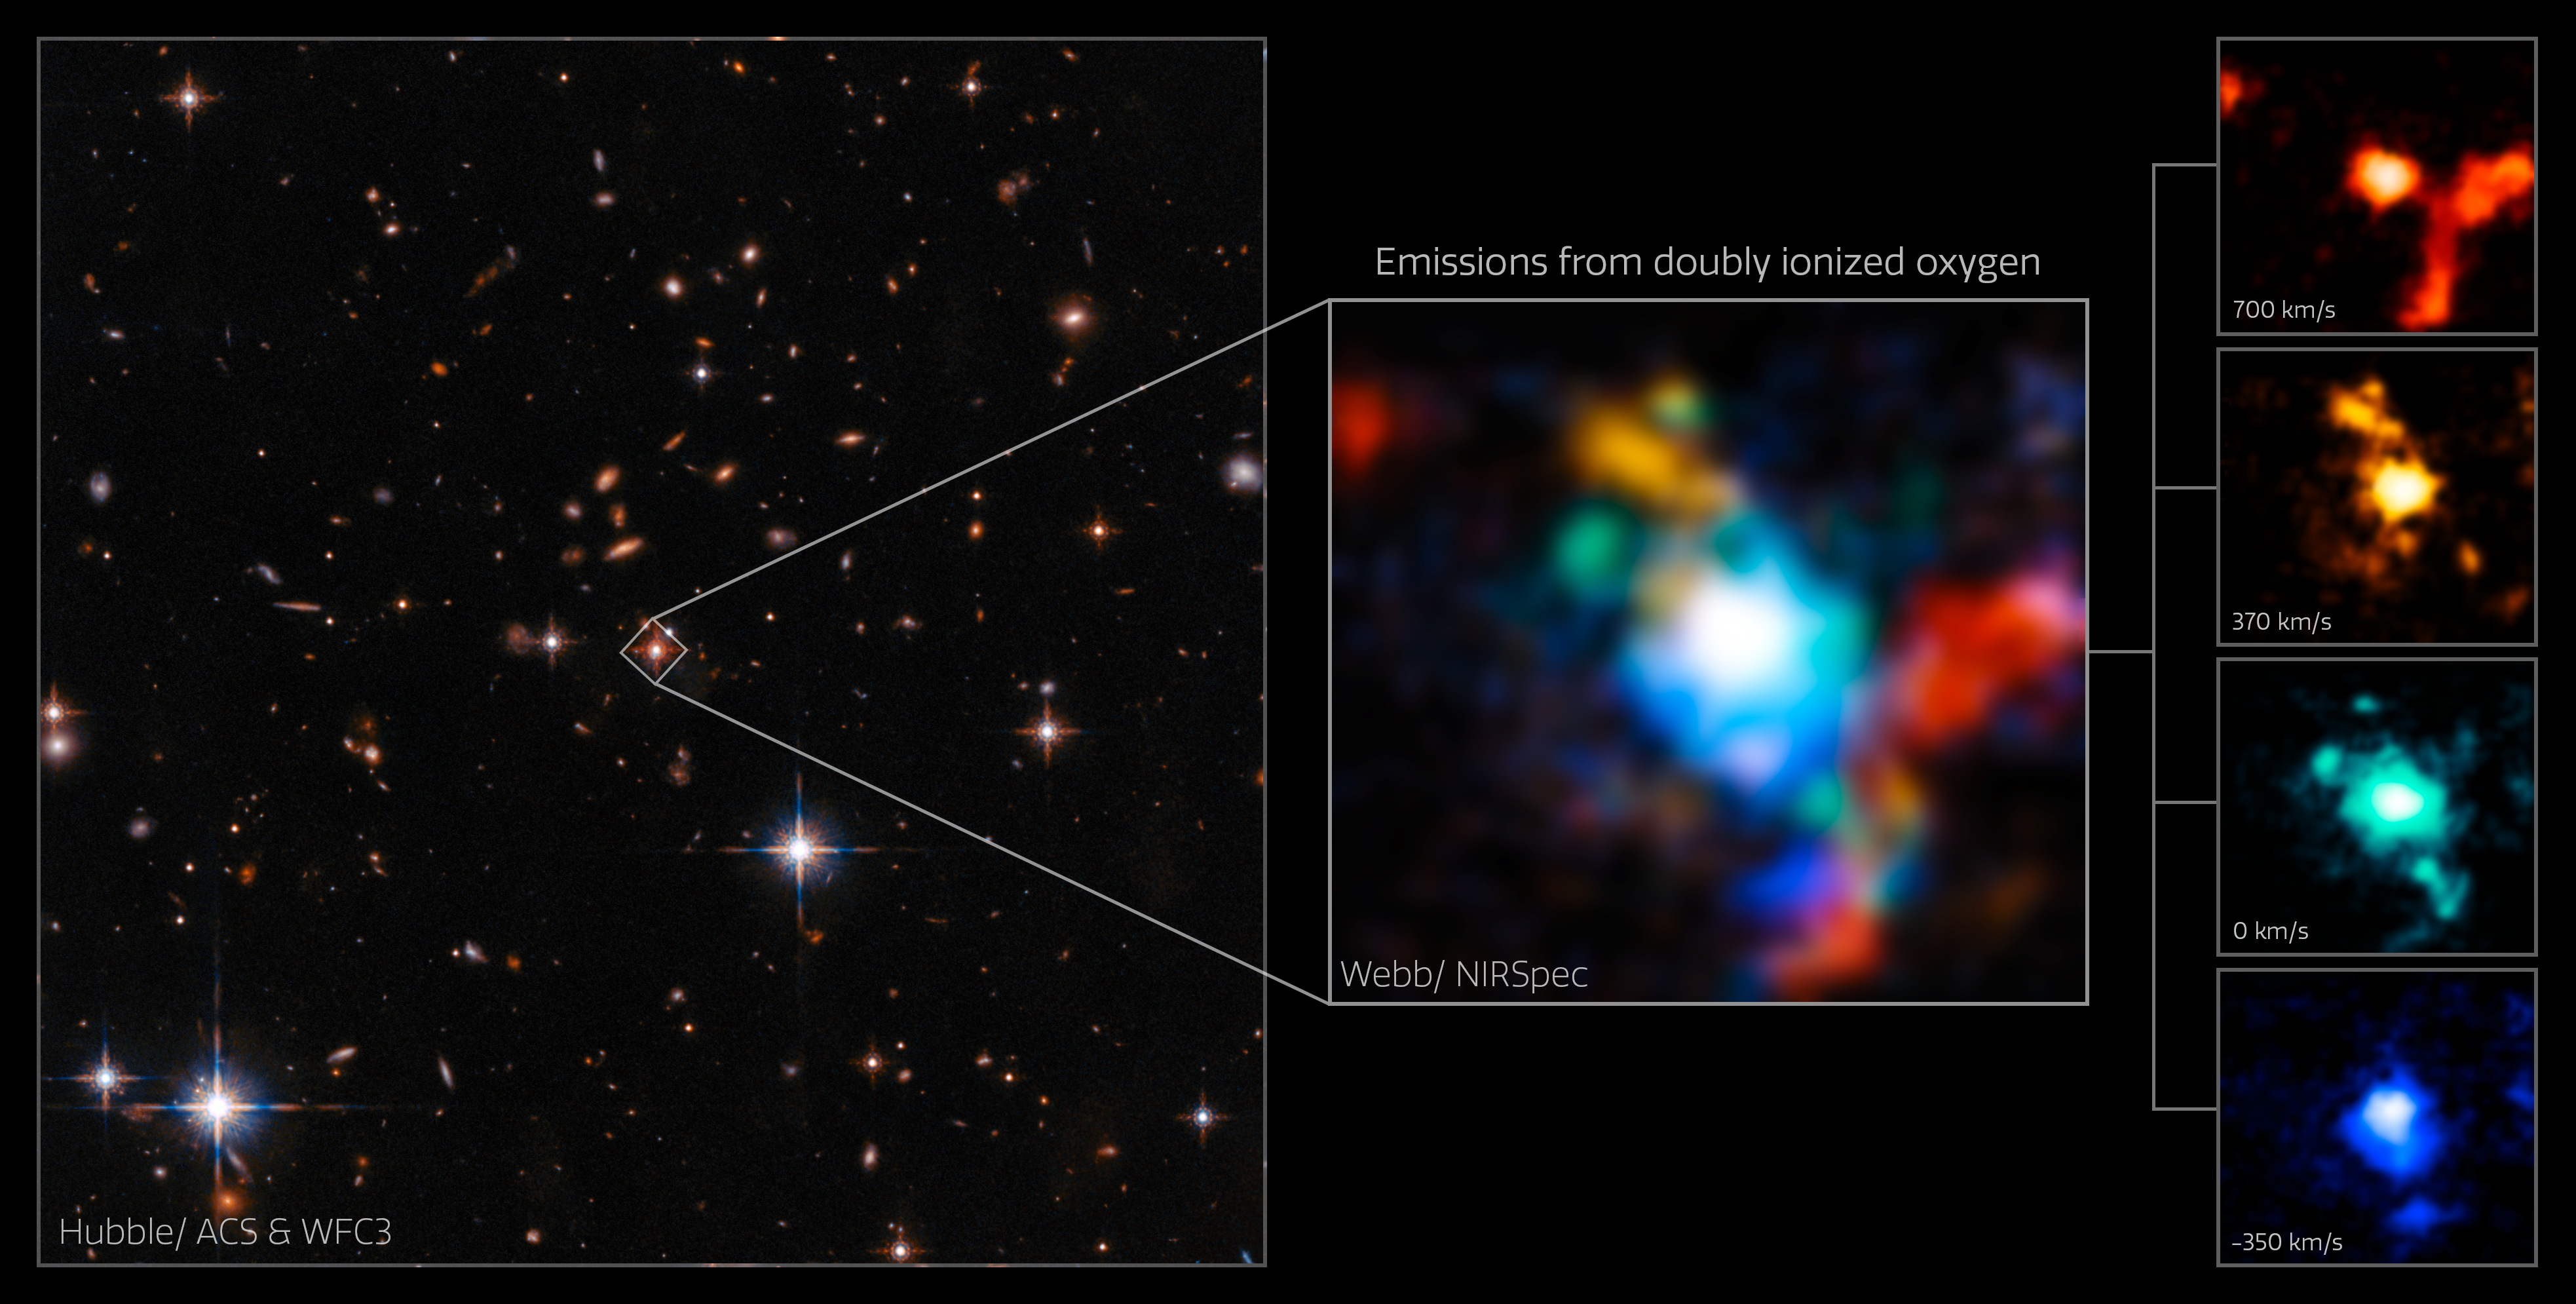

Webb's View Around the Extremely Red Quasar SDSS J165202.64+172852.3

The quasar SDSS J165202.64+172852.3 is highlighted in an image from the NASA/ESA Hubble Space Telescope in visible and near-infrared on the left. The images in the centre and on the right present new observations from the NASA/ESA/CSA James Webb Space Telescope in multiple wavelengths to demonstrate the distribution of gas around the object.

The quasar is an “extremely red” quasar that exists in the very early Universe, 11.5 billion years ago.

The image in the centre is composed of four narrow-band images made from the Webb NIRSpec instrument’s integral-field spectroscopy mode. All the four narrow-band images show extremely red-shifted emissions from doubly ionised oxygen which has an emission line around 500nm in visible light; before it was shifted to infrared light.

The panels on the right present the four narrow-band images separately. Each colour illustrates the relative speed of ionised oxygen gas across the cluster. The redder the colour the faster gas is moving away from our line of sight with the quasar, while the bluer the colour the faster it's moving away from the quasar toward us. The colour green indicates that the gas is steady in our line of sight in comparison to the quasar.

The blue and yellow panels reveal the bi-conical outflow from the quasar, with the orange panel showing the gas moving faster from us, which is extended towards the lower right, as well as highlighting a companion galaxy on the upper left of the frame.

Credit: ESA/Webb, NASA & CSA, D. Wylezalek, A. Vayner & the Q3D Team, N. Zakamska